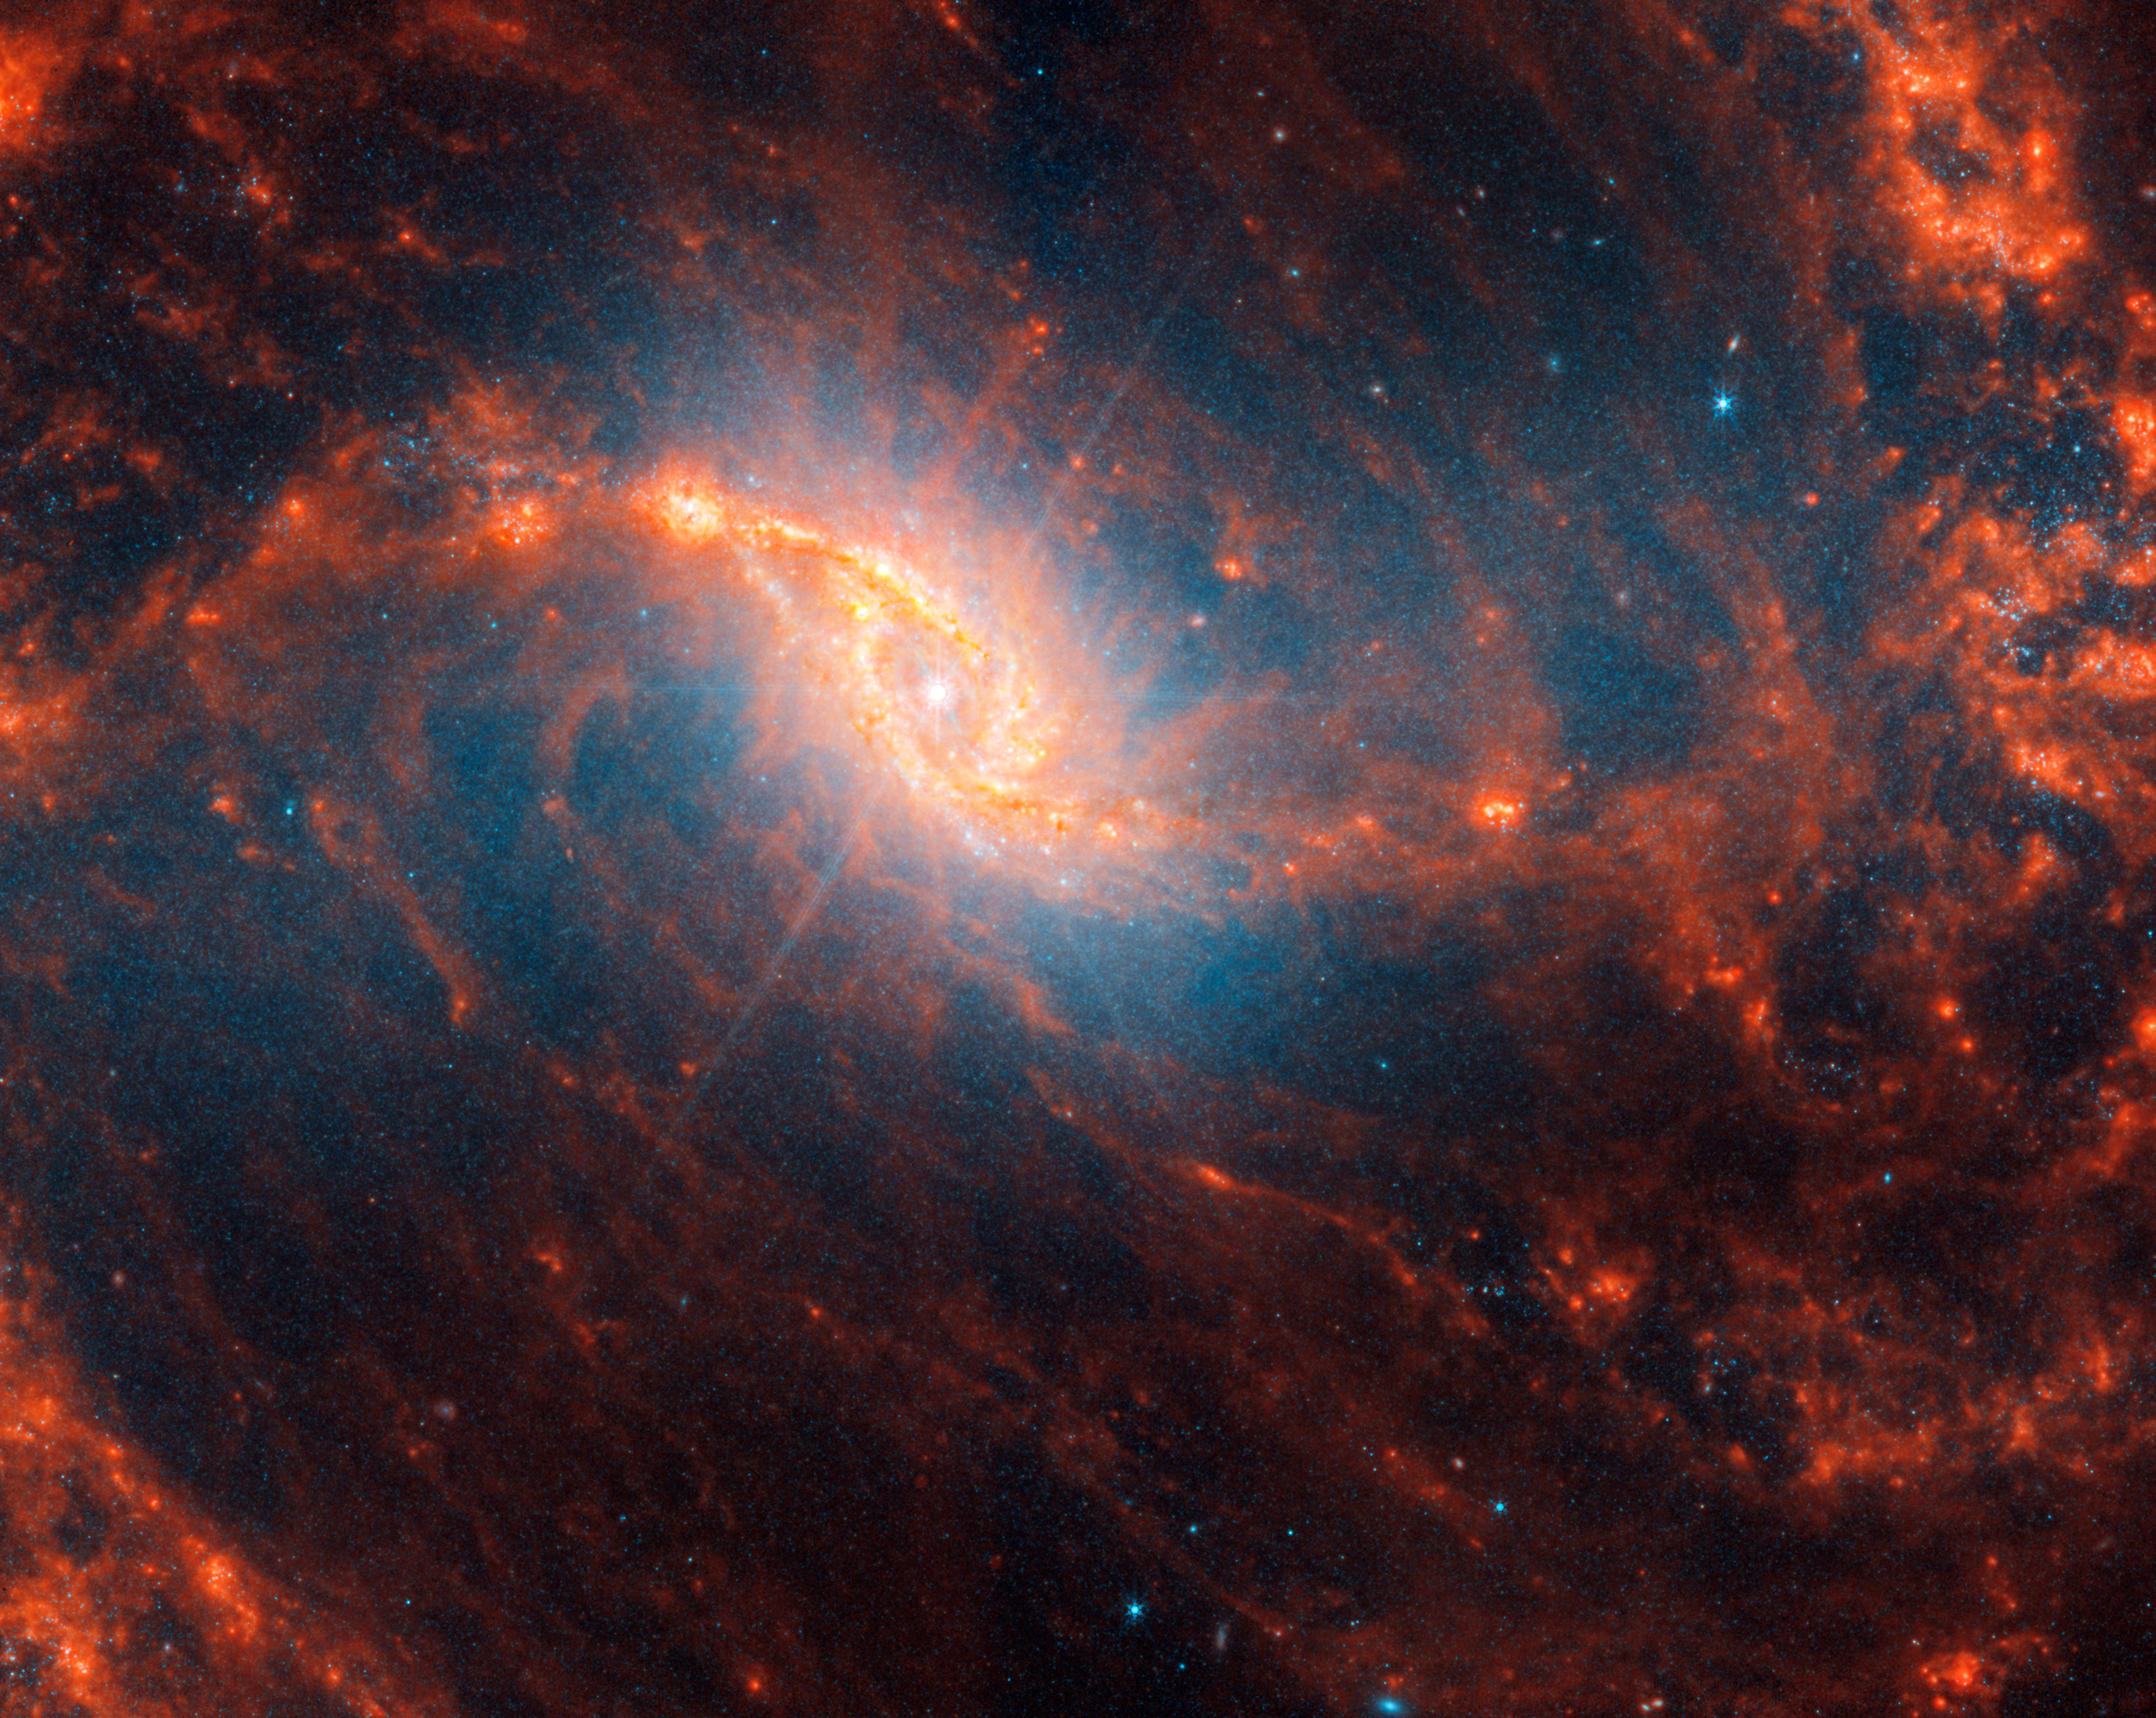

NGC 1365

This spiral galaxy was observed as part of the Physics at High Angular resolution in Nearby GalaxieS (PHANGS) program, a large project that includes observations from several space- and ground-based telescopes of many galaxies to help researchers study all phases of the star formation cycle, from the formation of stars within dusty gas clouds to the energy released in the process that creates the intricate structures revealed by Webb’s new images.

NGC 1365 is 56 million light-years away in the constellation Fornax.

Learn more about what can be seen in this vast collection of Webb images here.

Credit: NASA, ESA, CSA, STScI, J. Lee (STScI), T. Williams (Oxford), PHANGS Team